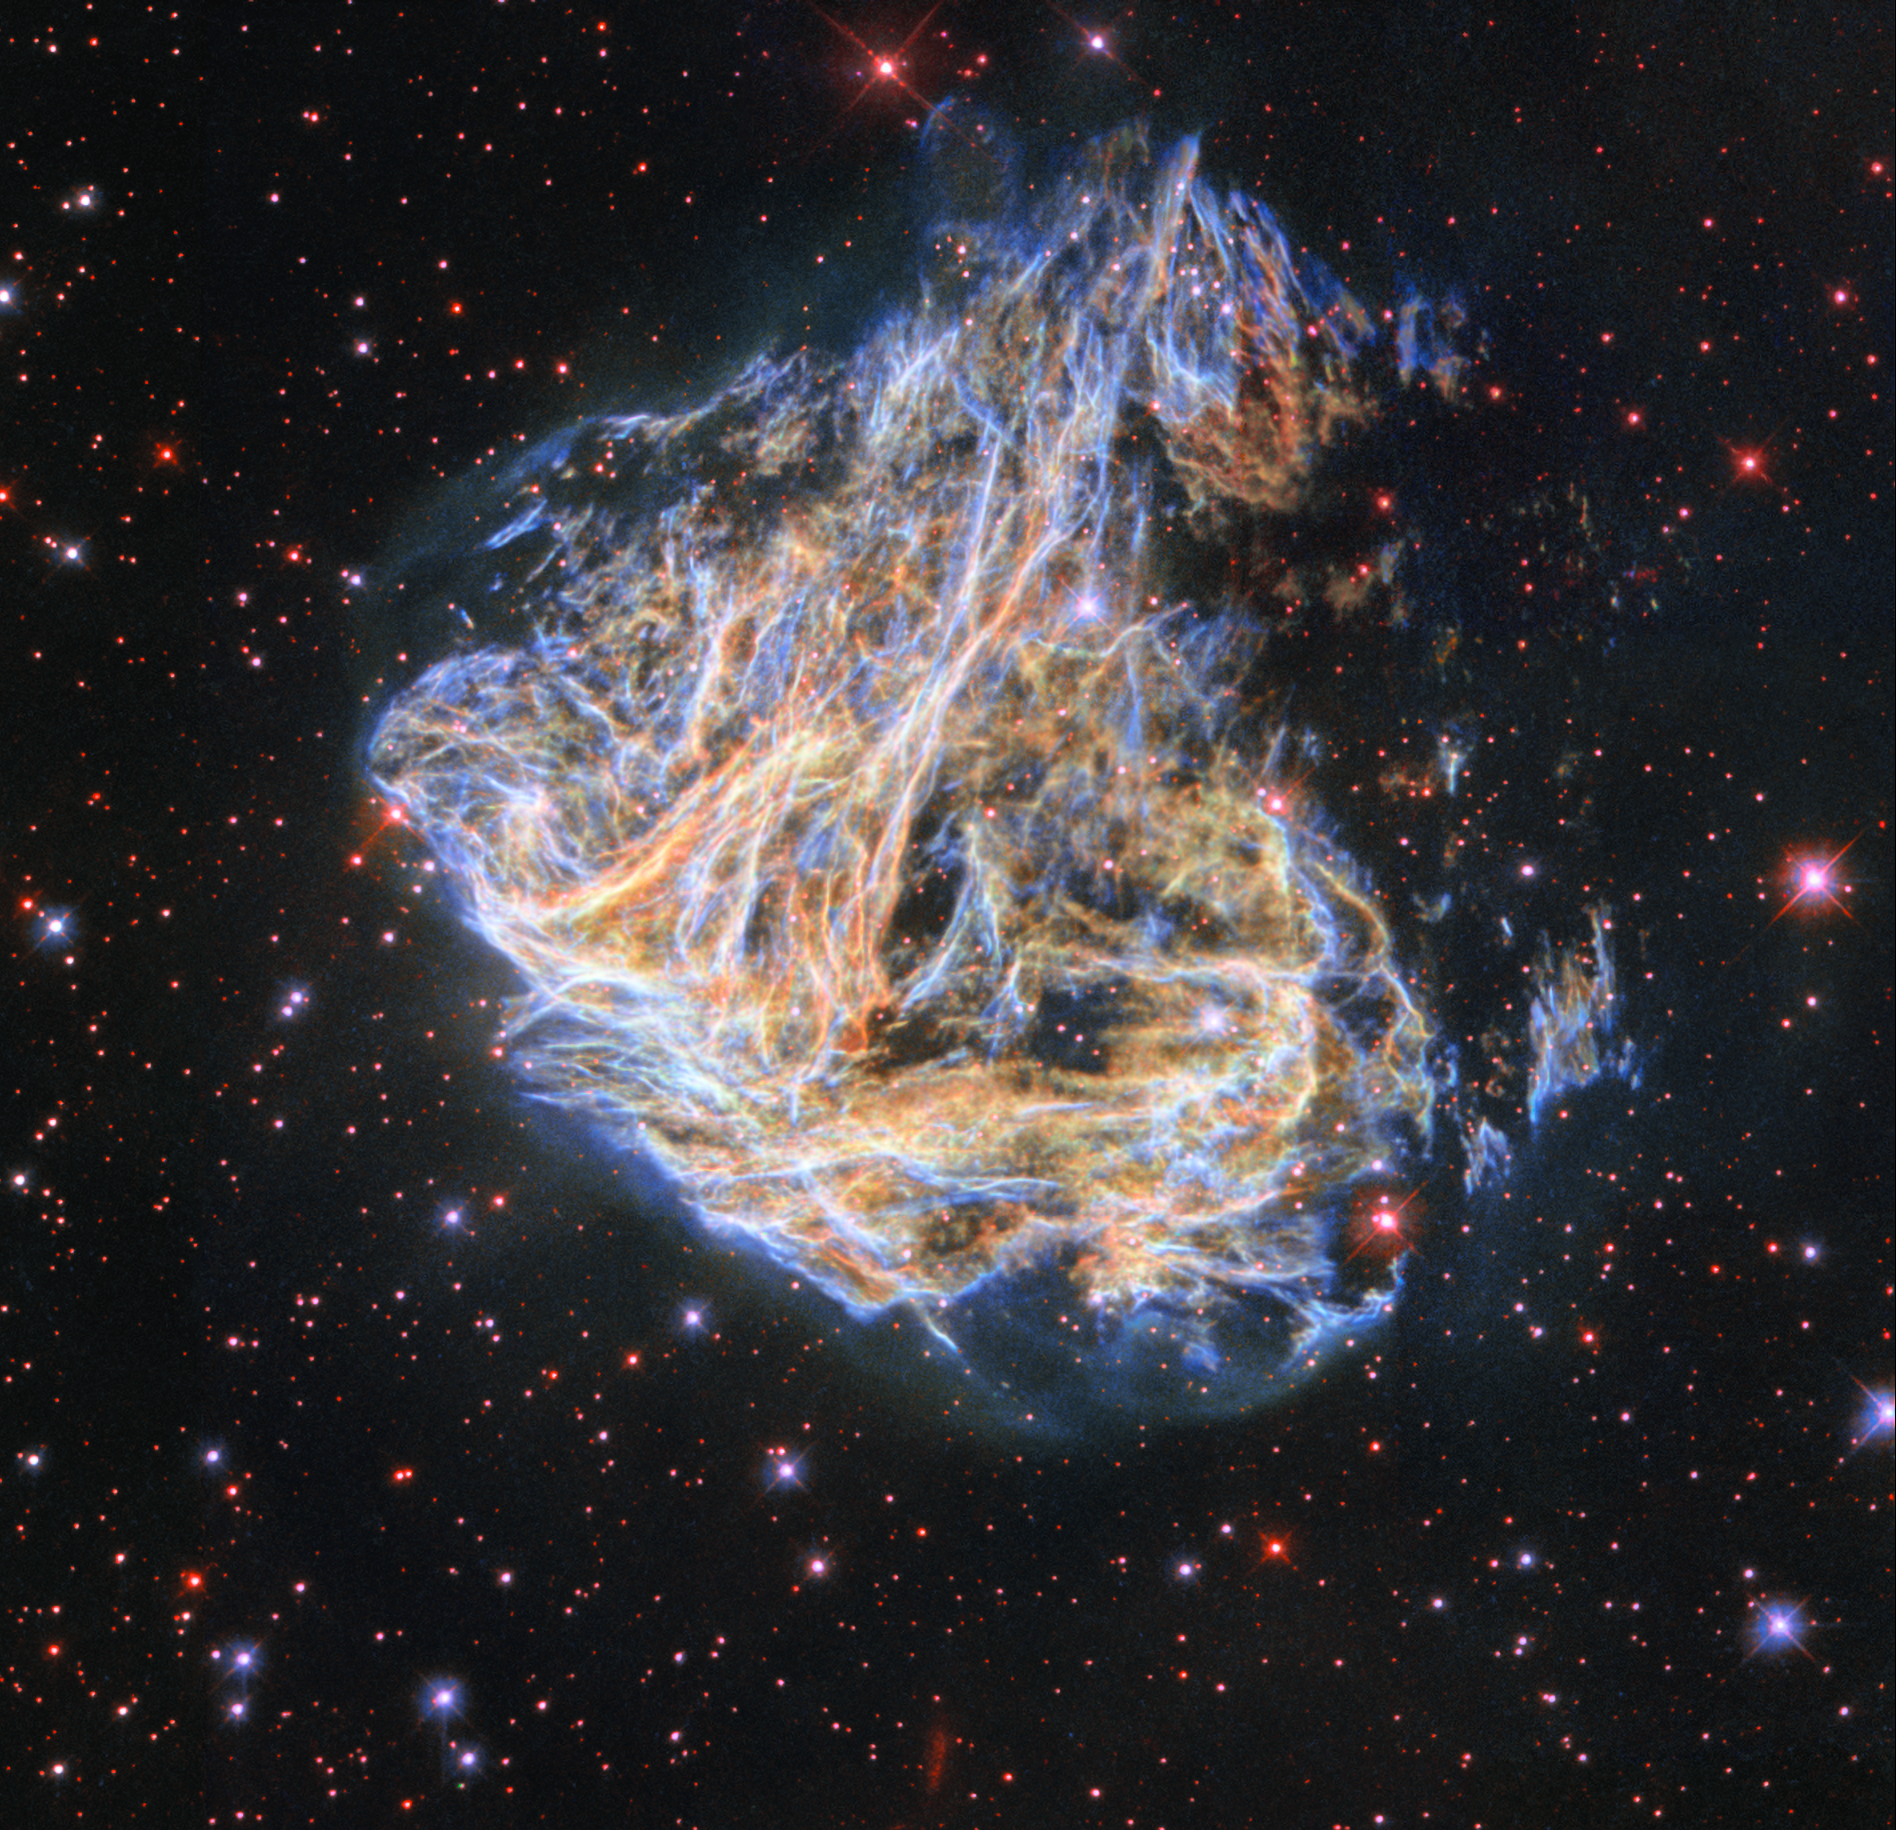

Revisiting a Celestial Fireworks Display

Shreds of the luridly coloured supernova remnant DEM L 190 seem to billow across the screen in this image from the NASA/ESA Hubble Space Telescope. The delicate sheets and intricate filaments are debris from the cataclysmic death of a massive star that once lived in the Large Magellanic Cloud, a small satellite galaxy of the Milky Way. DEM L 190 — also known as LMC N49 — is the brightest supernova remnant in the Large Magellanic Cloud and lies approximately 160 000 light-years away from Earth in the constellation Dorado.

This striking image was created with data from two different astronomical investigations, using one of Hubble’s retired instruments, the Wide Field Planetary Camera 2 (WFPC2). This instrument has since been replaced by the more powerful Wide Field Camera 3, but during its operational lifetime it contributed to cutting-edge science and produced a series of stunning public outreach images. The first of the two WFPC2 investigations used DEM L 190 as a natural laboratory in which to study the interaction of supernova remnants and the interstellar medium, the tenuous mixture of gas and dust that lies between stars. In the second project, astronomers turned to Hubble to pinpoint the origin of a Soft Gamma-ray Repeater, an enigmatic object lurking in DEM L 190 which repeatedly emits high-energy bursts of gamma rays.

This is not the first image of DEM L 190 to be released to the public — a previous Hubble portrait of this supernova remnant was published in 2003. This new image incorporates additional data and improved image processing techniques, making this spectacular celestial fireworks display even more striking!

Credit: ESA/Hubble & NASA, S. Kulkarni, Y. Chu